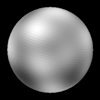

The Surface of Pluto

The never-before-seen surface of the distant planet Pluto is resolved in these Hubble Space Telescope pictures, taken with the European Space Agency's (ESA) Faint Object Camera (FOC) aboard Hubble.

Credit: Alan Stern (Southwest Research Institute), Marc Buie (Lowell Observatory), NASA and ESA